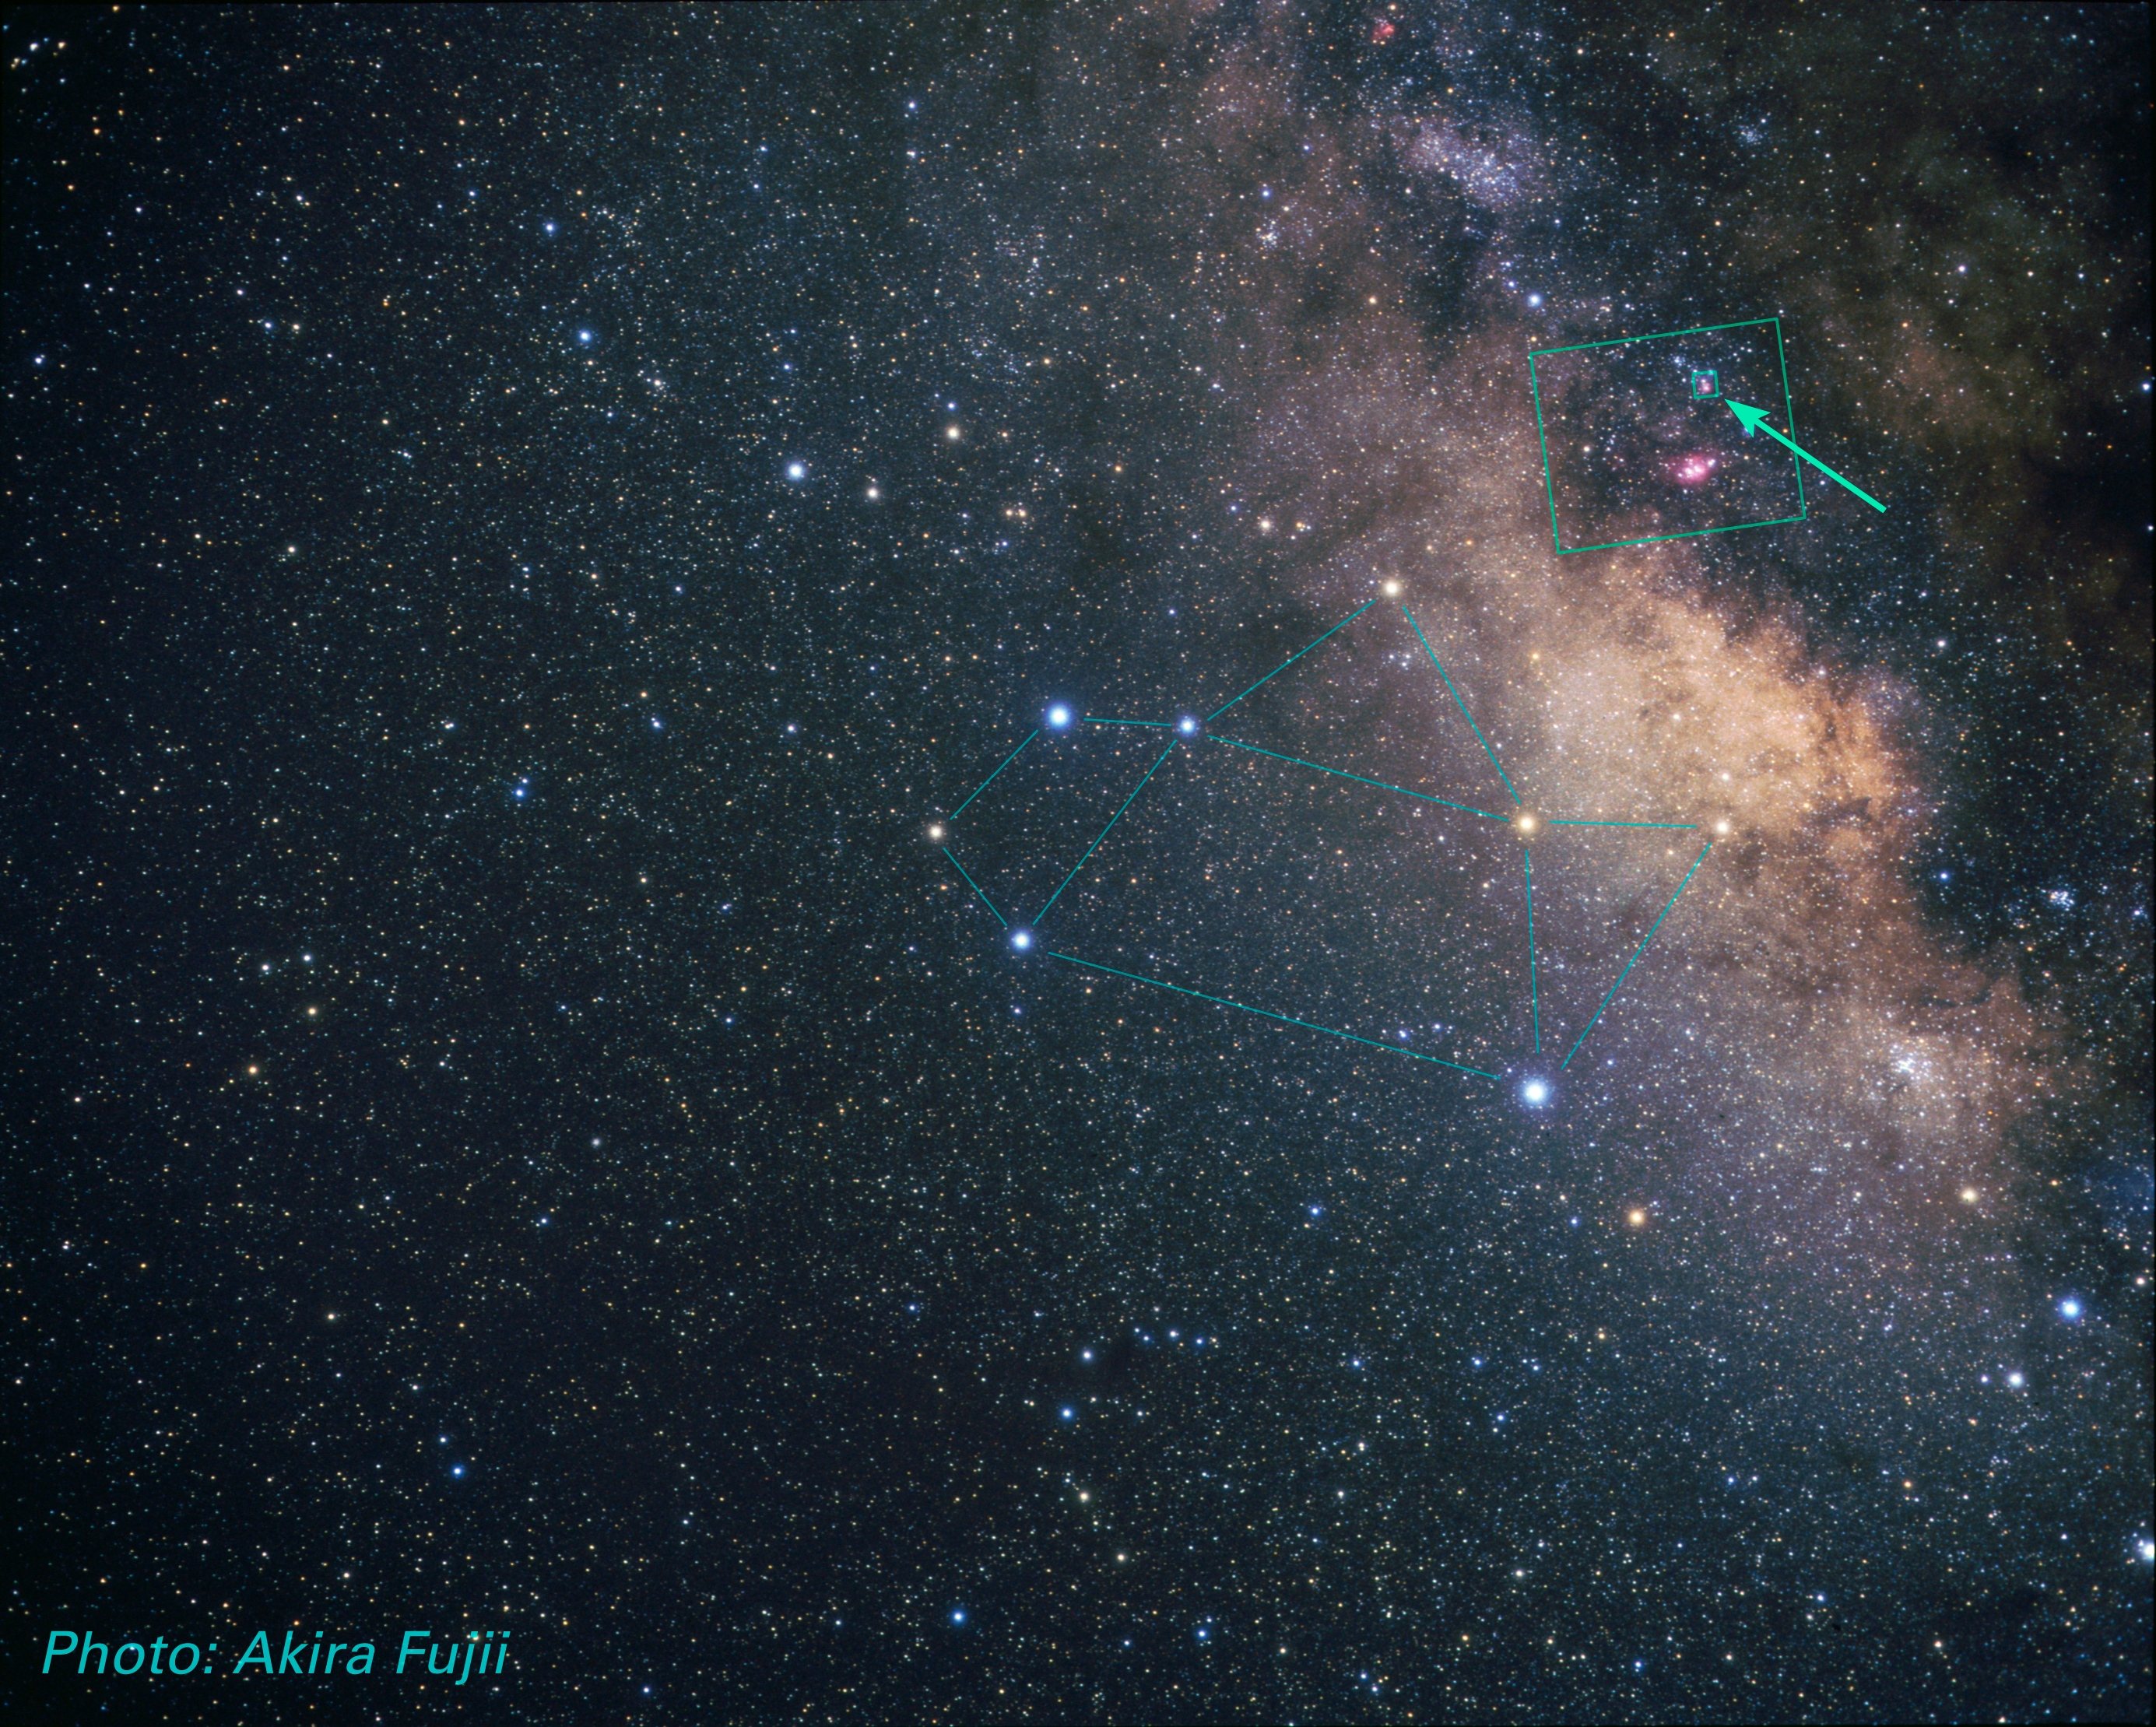

Sagittarius Constellation (ground-based image)

Ground-based image showing the constellation of Sagittarius.

Credit: A. Fujii